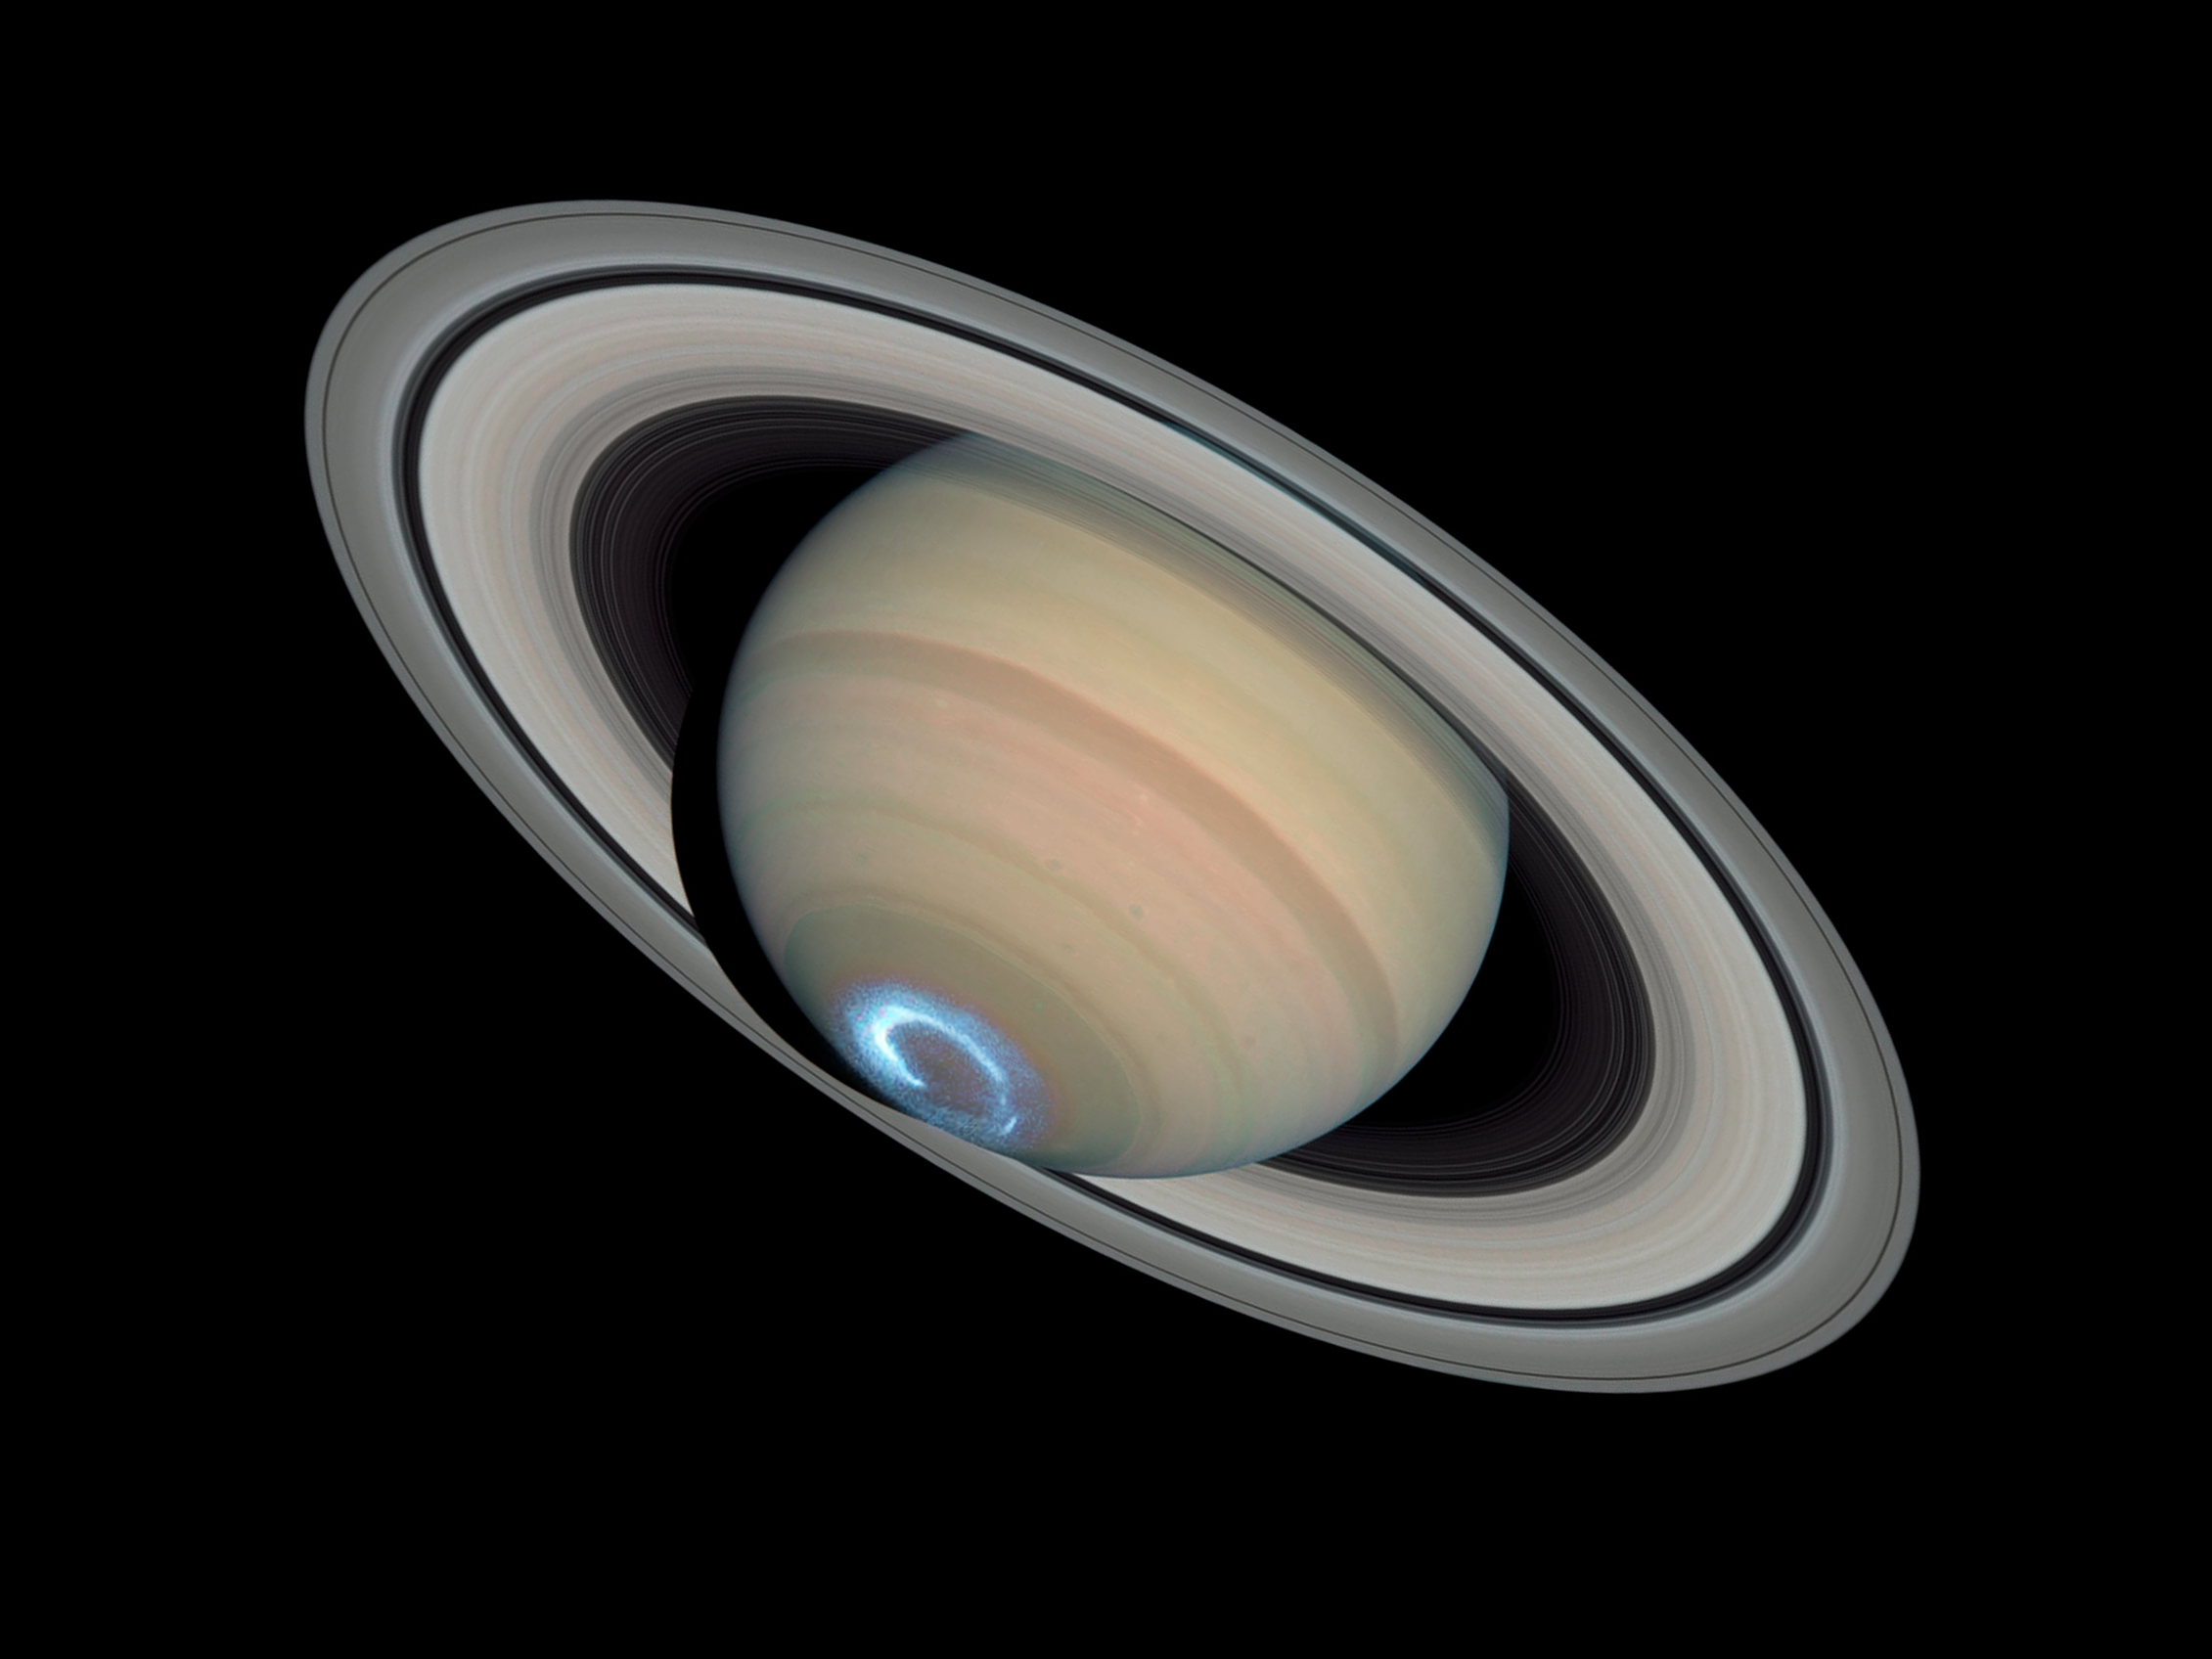

Saturn's dynamic aurorae 1 (Jan 28, 2004)

This is a single image from a sequence of three aurora images.

Astronomers combined ultraviolet images of Saturn's southern polar region with visible-light images of the planet and its rings to make this picture. The auroral display appears blue because of the glow of ultraviolet light. In reality, the aurora would appear red to an observer at Saturn because of the presence of glowing hydrogen in the atmosphere. On Earth, charged particles from the Sun collide with nitrogen and oxygen in the upper atmosphere, creating auroral displays colored mostly green and blue.

The ultraviolet image was taken on Jan. 28, 2004 by Hubble's Space Telescope Imaging Spectrograph. Erich Karkoschka of the University of Arizona, USA used the telescope's Advanced Camera for Surveys on March 22, 2004 to take the visible-light image.

Credit: NASA, ESA, J. Clarke (Boston University, USA), and Z. Levay (STScI)